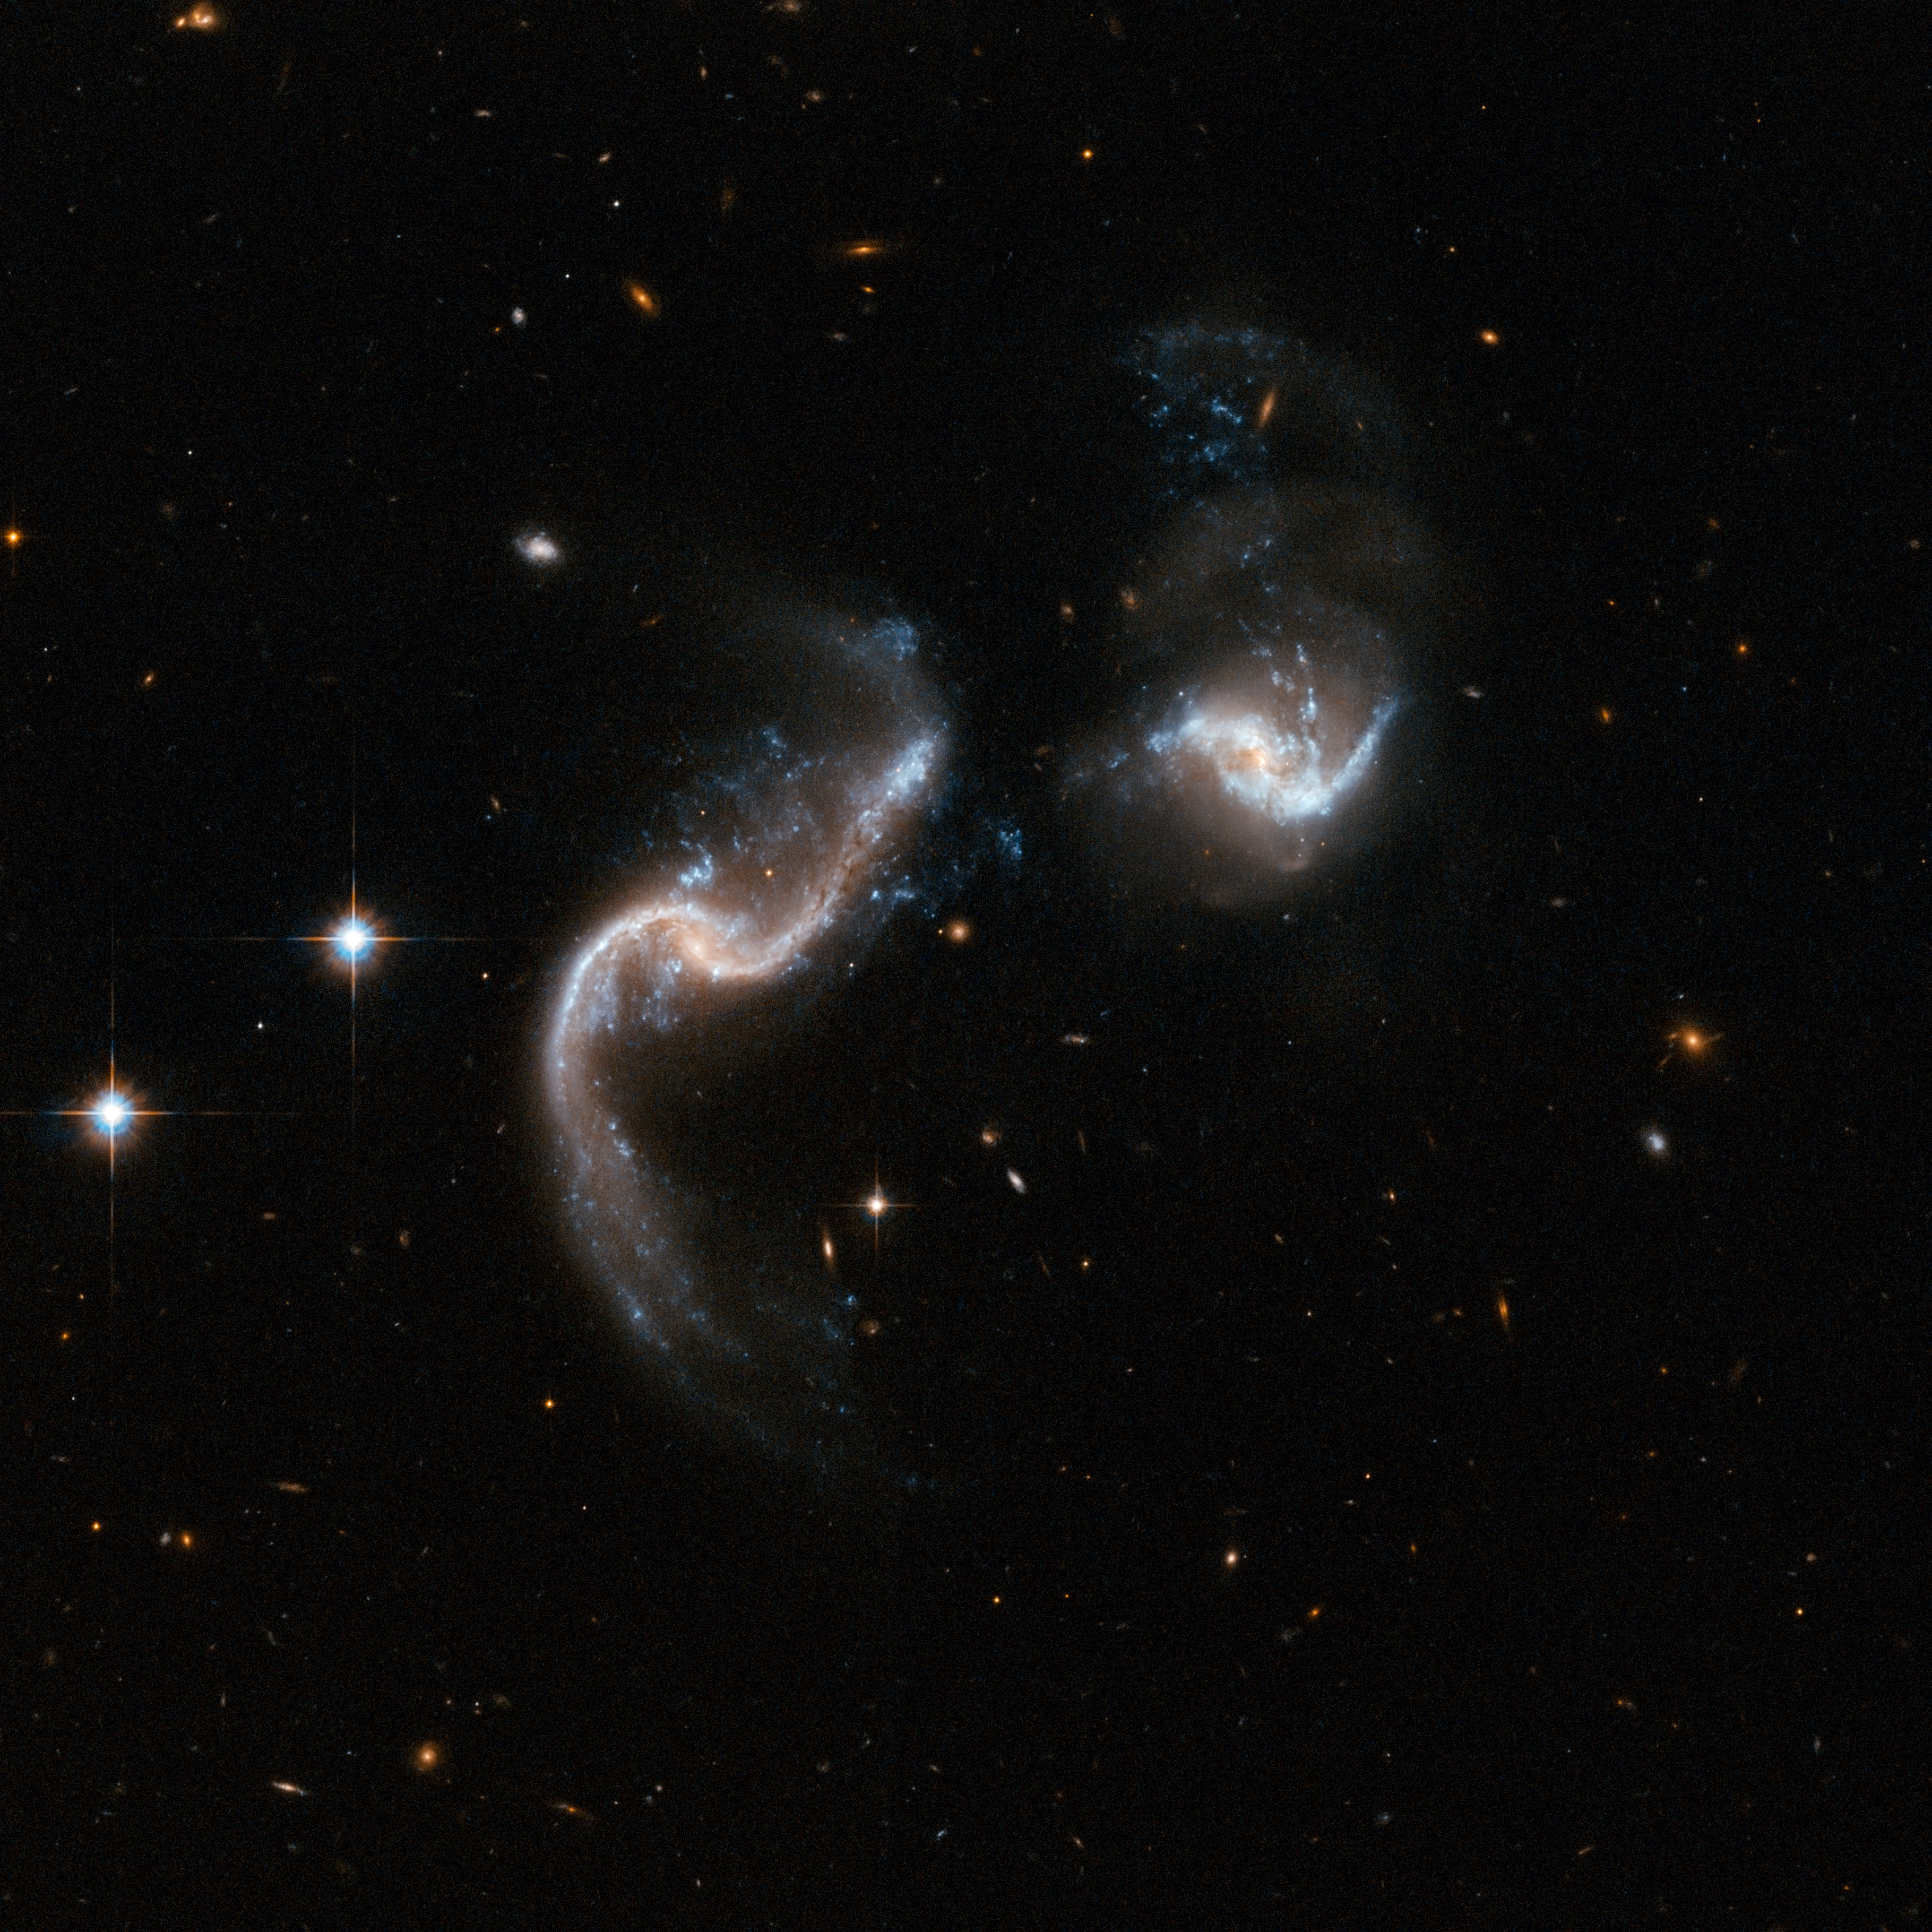

Arp 256

Arp 256 is a stunning system of two spiral galaxies in an early stage of merging. The Hubble image displays two galaxies with strongly disrupted shapes and an astonishing number of blue knots of star formation that look like exploding fireworks. The galaxy to the left has two extended ribbon-like tails of gas, dust and stars. The system is a luminous infrared system radiating more than a hundred billion times the luminosity of our Sun. Arp 256 is located in the constellation of Cetus, the Whale, about 350 million light-years away. It is the 256th galaxy in Arp's Atlas of Peculiar Galaxies.

This image is part of a large collection of 59 images of merging galaxies taken by the Hubble Space Telescope and released on the occasion of its 18th anniversary on 24th April 2008.

Credit: NASA, ESA, the Hubble Heritage Team (STScI/AURA)-ESA/Hubble Collaboration and A. Evans (University of Virginia, Charlottesville/NRAO/Stony Brook University)